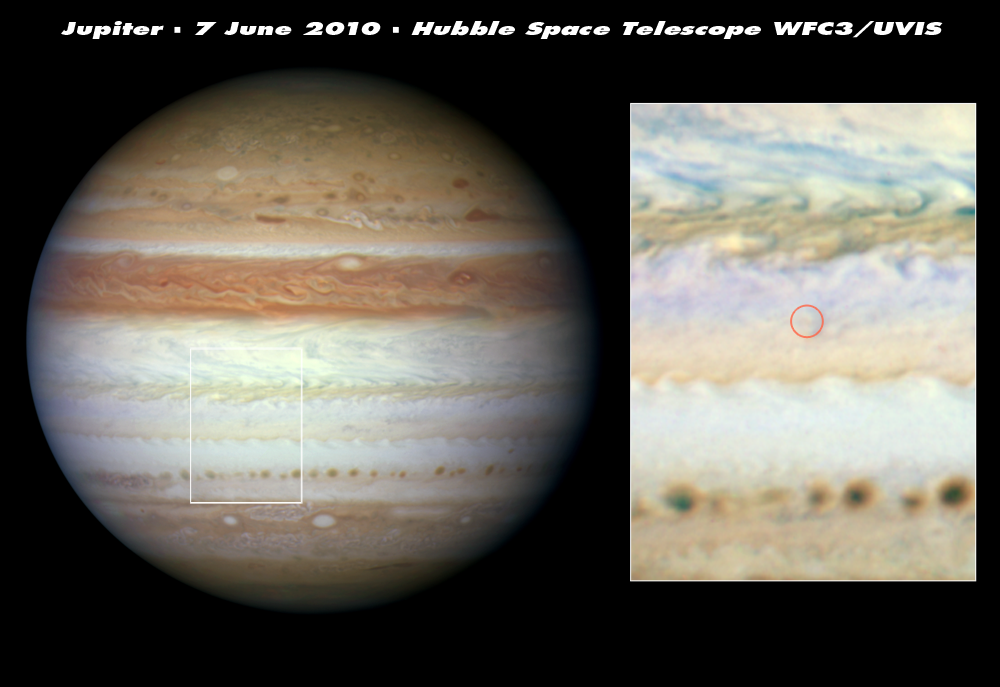

Mysterious flash on Jupiter left no debris cloud

Detailed observations made by the NASA/ESA Hubble Space Telescope have led researchers to believe that the flash of light seen on Jupiter on 3 June was a meteor. This visitor from space did not plunge deep enough into the atmosphere to explode and leave behind any telltale cloud of debris, as seen in previous Jupiter collisions.

Hubble’s sharp vision and ultraviolet sensitivity were used to seek out any trace evidence of the aftermath of the cosmic collision (right inset). Images taken on 7 June show no sign of dark debris above Jupiter’s cloud tops. This means that the object didn’t descend beneath the clouds and explode as a fireball. If it had, dark sooty blast debris would have been ejected and would have subsequently settled down onto the cloud tops.

Australian amateur astronomer Anthony Wesley first saw the flash at 22:31 CEST on 3 June. He was watching a live video feed of Jupiter from his telescope. In the Philippines, amateur astronomer Chris Go confirmed that he had simultaneously recorded the transitory event on video.

This natural colour photo was taken in visible light with Hubble’s Wide Field Camera 3.

Credit: NASA, ESA, M. H. Wong (University of California, Berkeley, USA), H. B. Hammel (Space Science Institute, Boulder, Colorado, USA), A. A. Simon-Miller (Goddard Space Flight Center, Greenbelt, Maryland, USA) and the Jupiter Impact Science Team.